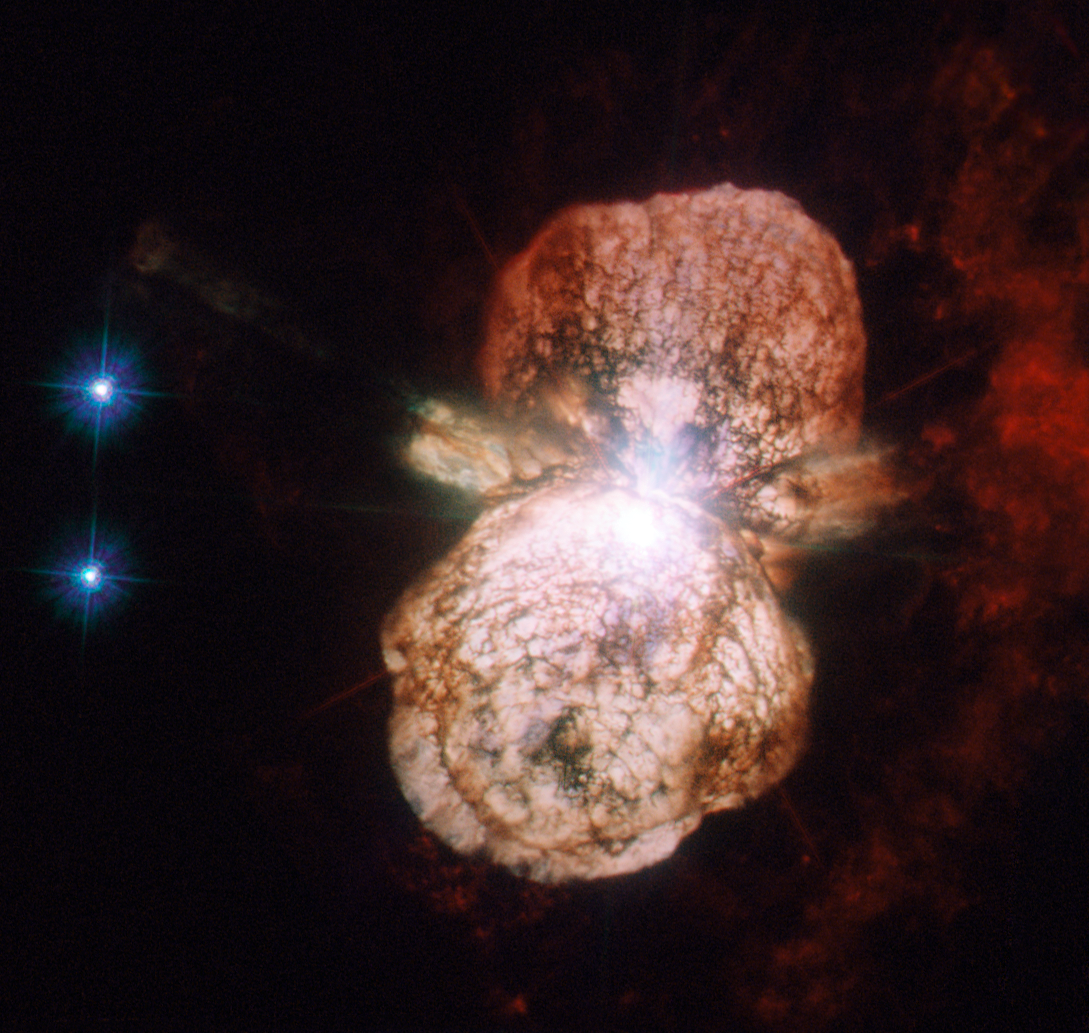

Preview of a forthcoming supernova

At the turn of the 19th century, the binary star system Eta Carinae was faint and undistinguished. In the first decades of the century, it became brighter and brighter, until, by April 1843, it was the second brightest star in the sky, outshone only by Sirius (which is almost a thousand times closer to Earth). In the years that followed, it gradually dimmed again and by the 20th century was totally invisible to the naked eye.

The star has continued to vary in brightness ever since, and while it is once again visible to the naked eye on a dark night, it has never again come close to its peak of 1843.

The larger of the two stars in the Eta Carinae system is a huge and unstable star that is nearing the end of its life, and the event that the 19th century astronomers observed was a stellar near-death experience. Scientists call these outbursts supernova impostor events, because they appear similar to supernovae but stop just short of destroying their star.

Although 19th century astronomers did not have telescopes powerful enough to see the 1843 outburst in detail, its effects can be studied today. The huge clouds of matter thrown out a century and a half ago, known as the Homunculus Nebula, have been a regular target for Hubble since its launch in 1990. This image, taken with the Advanced Camera for Surveys High Resolution Channel is the most detailed yet, and shows how the material from the star was not thrown out in a uniform manner, but forms a huge dumbbell shape.

Eta Carinae is not only interesting because of its past, but also because of its future. It is one of the closest stars to Earth that is likely to explode in a supernova in the relatively near future (though in astronomical timescales the “near future” could still be a million years away). When it does, expect an impressive view from Earth, far brighter still than its last outburst: SN 2006gy, the brightest supernova ever observed, came from a star of the same type.

This image consists of ultraviolet and visible light images from the High Resolution Channel of Hubble’s Advanced Camera for Surveys. The field of view is approximately 30 arcseconds across.

Credit: ESA/Hubble & NASA